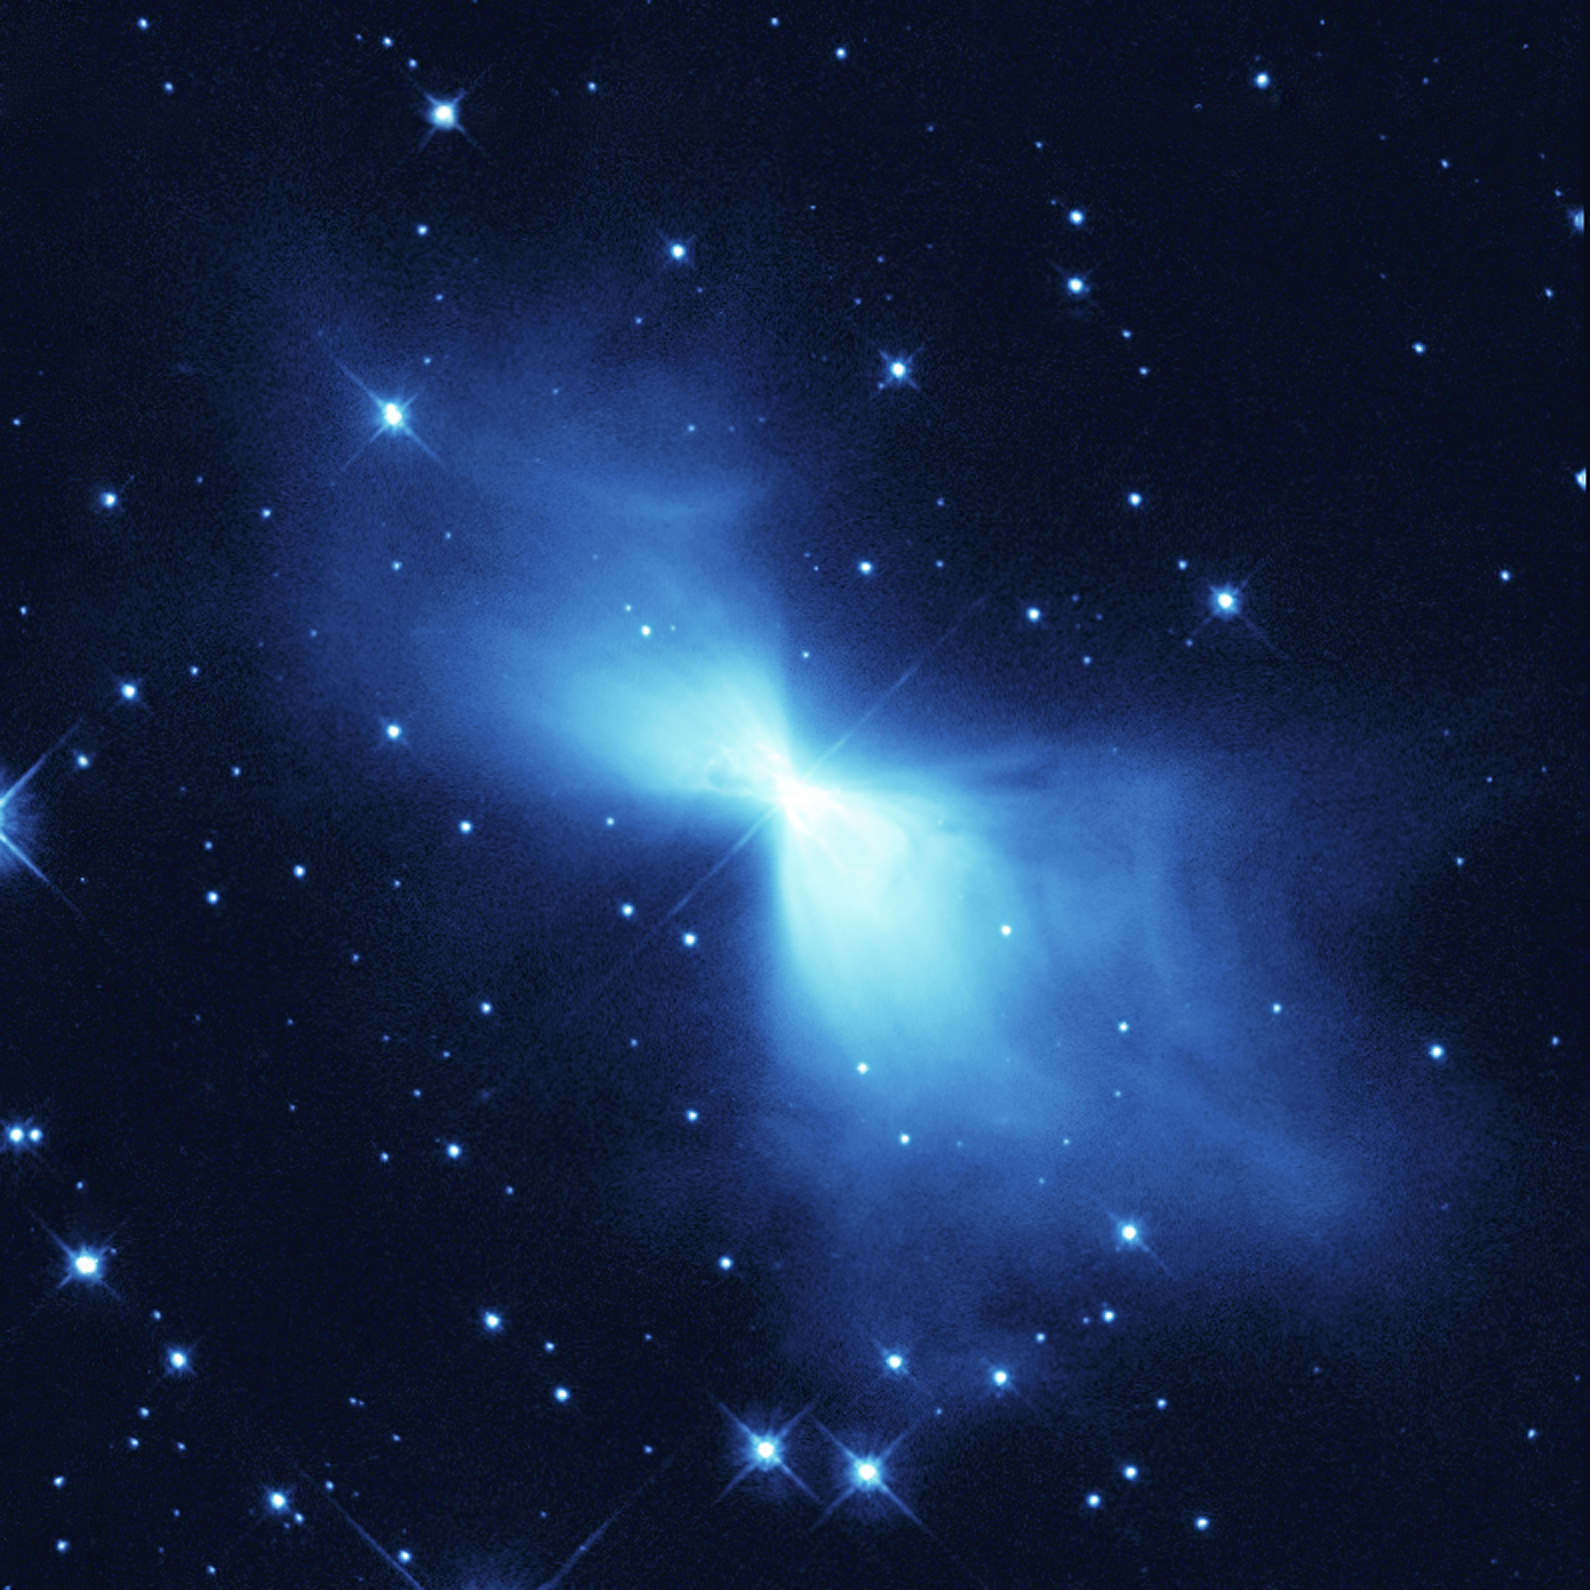

The Boomerang Nebula - the coolest place in the Universe?

The Boomerang Nebula is a young planetary nebula and the coldest object found in the Universe so far. The NASA/ESA Hubble Space Telescope image is yet another example of how Hubble's sharp eye reveals surprising details in celestial objects.

This NASA/ESA Hubble Space Telescope image shows a young planetary nebula known (rather curiously) as the Boomerang Nebula. It is in the constellation of Centaurus, 5000 light-years from Earth. Planetary nebulae form around a bright, central star when it expels gas in the last stages of its life.

The Boomerang Nebula is one of the Universe's peculiar places. In 1995, using the 15-metre Swedish ESO Submillimetre Telescope in Chile, astronomers Sahai and Nyman revealed that it is the coldest place in the Universe found so far. With a temperature of -272C, it is only 1 degree warmer than absolute zero (the lowest limit for all temperatures). Even the -270C background glow from the Big Bang is warmer than this nebula. It is the only object found so far that has a temperature lower than the background radiation.

Keith Taylor and Mike Scarrott called it the Boomerang Nebula in 1980 after observing it with a large ground-based telescope in Australia. Unable to see the detail that only Hubble can reveal, the astronomers saw merely a slight asymmetry in the nebula's lobes suggesting a curved shape like a boomerang. The high-resolution Hubble images indicate that 'the Bow tie Nebula' would perhaps have been a better name.

The Hubble telescope took this image in 1998. It shows faint arcs and ghostly filaments embedded within the diffuse gas of the nebula's smooth 'bow tie' lobes. The diffuse bow-tie shape of this nebula makes it quite different from other observed planetary nebulae, which normally have lobes that look more like 'bubbles' blown in the gas. However, the Boomerang Nebula is so young that it may not have had time to develop these structures. Why planetary nebulae have so many different shapes is still a mystery.

The general bow-tie shape of the Boomerang appears to have been created by a very fierce 500 000 kilometre-per-hour wind blowing ultracold gas away from the dying central star. The star has been losing as much as one-thousandth of a solar mass of material per year for 1500 years. This is 10-100 times more than in other similar objects. The rapid expansion of the nebula has enabled it to become the coldest known region in the Universe.

The image was exposed for 1000 seconds through a green-yellow filter. The light in the image comes from starlight from the central star reflected by dust particles.

Credit: European Space Agency, NASA